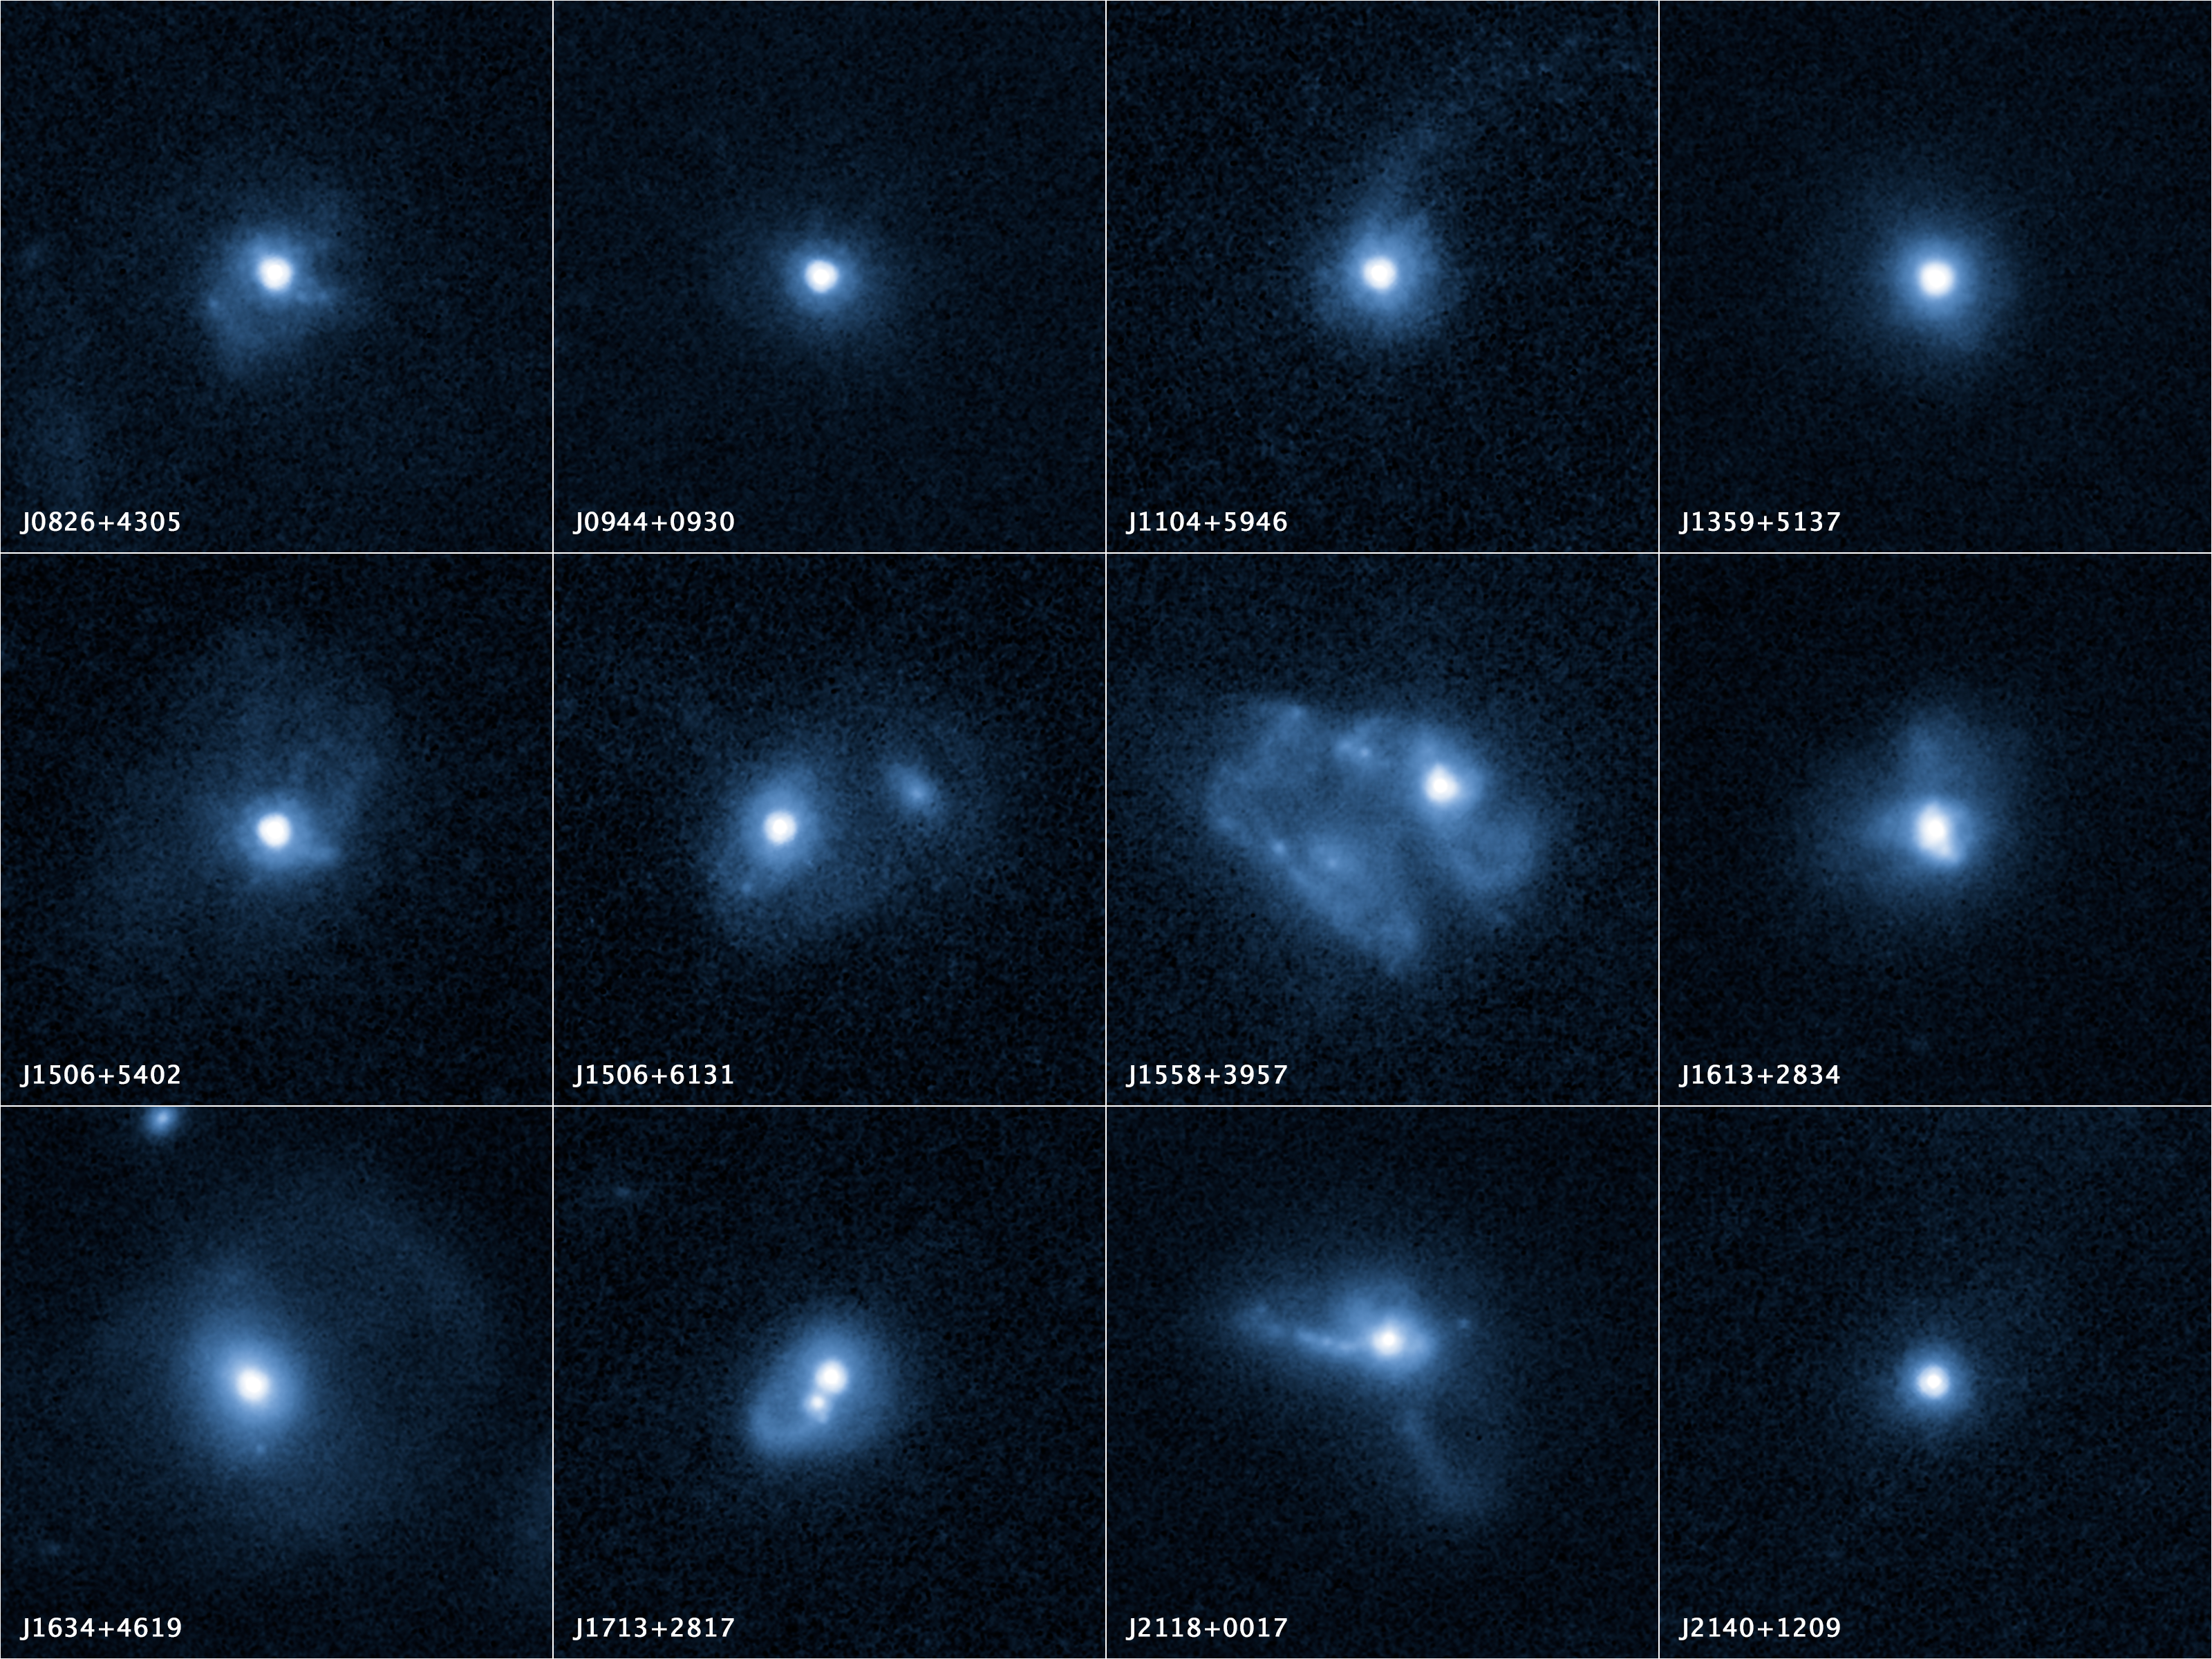

Outflows from twelve merging galaxies

The twelve galaxies in these NASA/ESA Hubble Space Telescope images are undergoing a firestorm of star birth, as shown by their bright white cores.

Hubble reveals that the galaxies' star-making frenzy was ignited by mergers with other galaxies. The odd shapes of many of the galaxies are telltale evidence of those close encounters.

The new Hubble Wide Field Camera 3 observations suggest that energy from the star-birthing frenzy created powerful winds that are blowing out the gas, meaning it is not available to form future generations of stars.

This activity occurred when the Universe was half its current age of 13.7 billion years. The gas-poor galaxies may eventually become so-called red and dead galaxies, composed only of aging stars.

The galaxies are the most compact yet found. They contain as much mass as our Milky Way galaxy, but packed into a much smaller area. The smallest galaxies are about 650 light-years across, one-sixtieth the width of our Milky Way galaxy.

The Hubble false-colour images were processed to bring out important details in the galaxies. The images were taken in 2010.

Credit: NASA, ESA, and P. Sell (Texas Tech University)